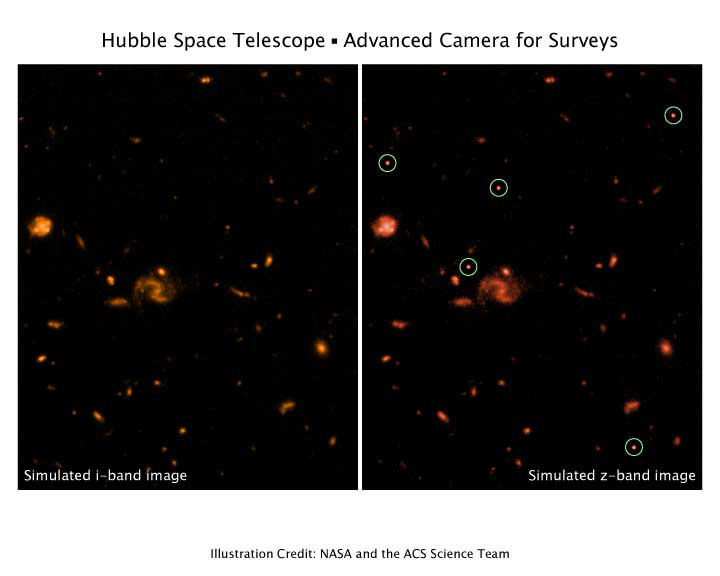

ACS will find the most distant galaxies

A demonstration of ACS's ability to detect and identify the most distant galaxies in the universe, which are seen at an epoch when the universe was only about 5% of its present age. These primordial galaxies (circled) will be visible in images taken through the ACS 'z-band' filter, the reddest filter in the ACS instrument, but not in images taken with bluer filters, such as the 'i-band' image shown here.

Unlike more local galaxies, which are visible in the bluer filters as well, the very large 'redshifts' of galaxies at the edge of the observable universe mean that no light is emitted at the blue end of the spectrum. The vastly improved red sensitivity of ACS will enable astronomers to pick out and study such primordial galaxies from among the myriad of other, more commonplace, galaxies.

Credit: NASA/ESA and the ACS Science Team